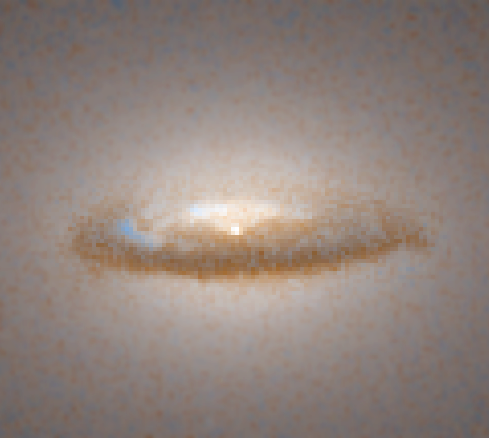

Disk around a black hole in galaxy NGC 7052 (Hubble WFPC2 view)

This NASA/ESA Hubble Space Telescope image was taken with the Wide Field and Planetary Camera 2, in visible light. Details as small as 50 light-years across can be seen.

Credit: Roeland P. van der Marel (STScI), Frank C. van den Bosch (Univ. of Washington), and NASA/ESA.